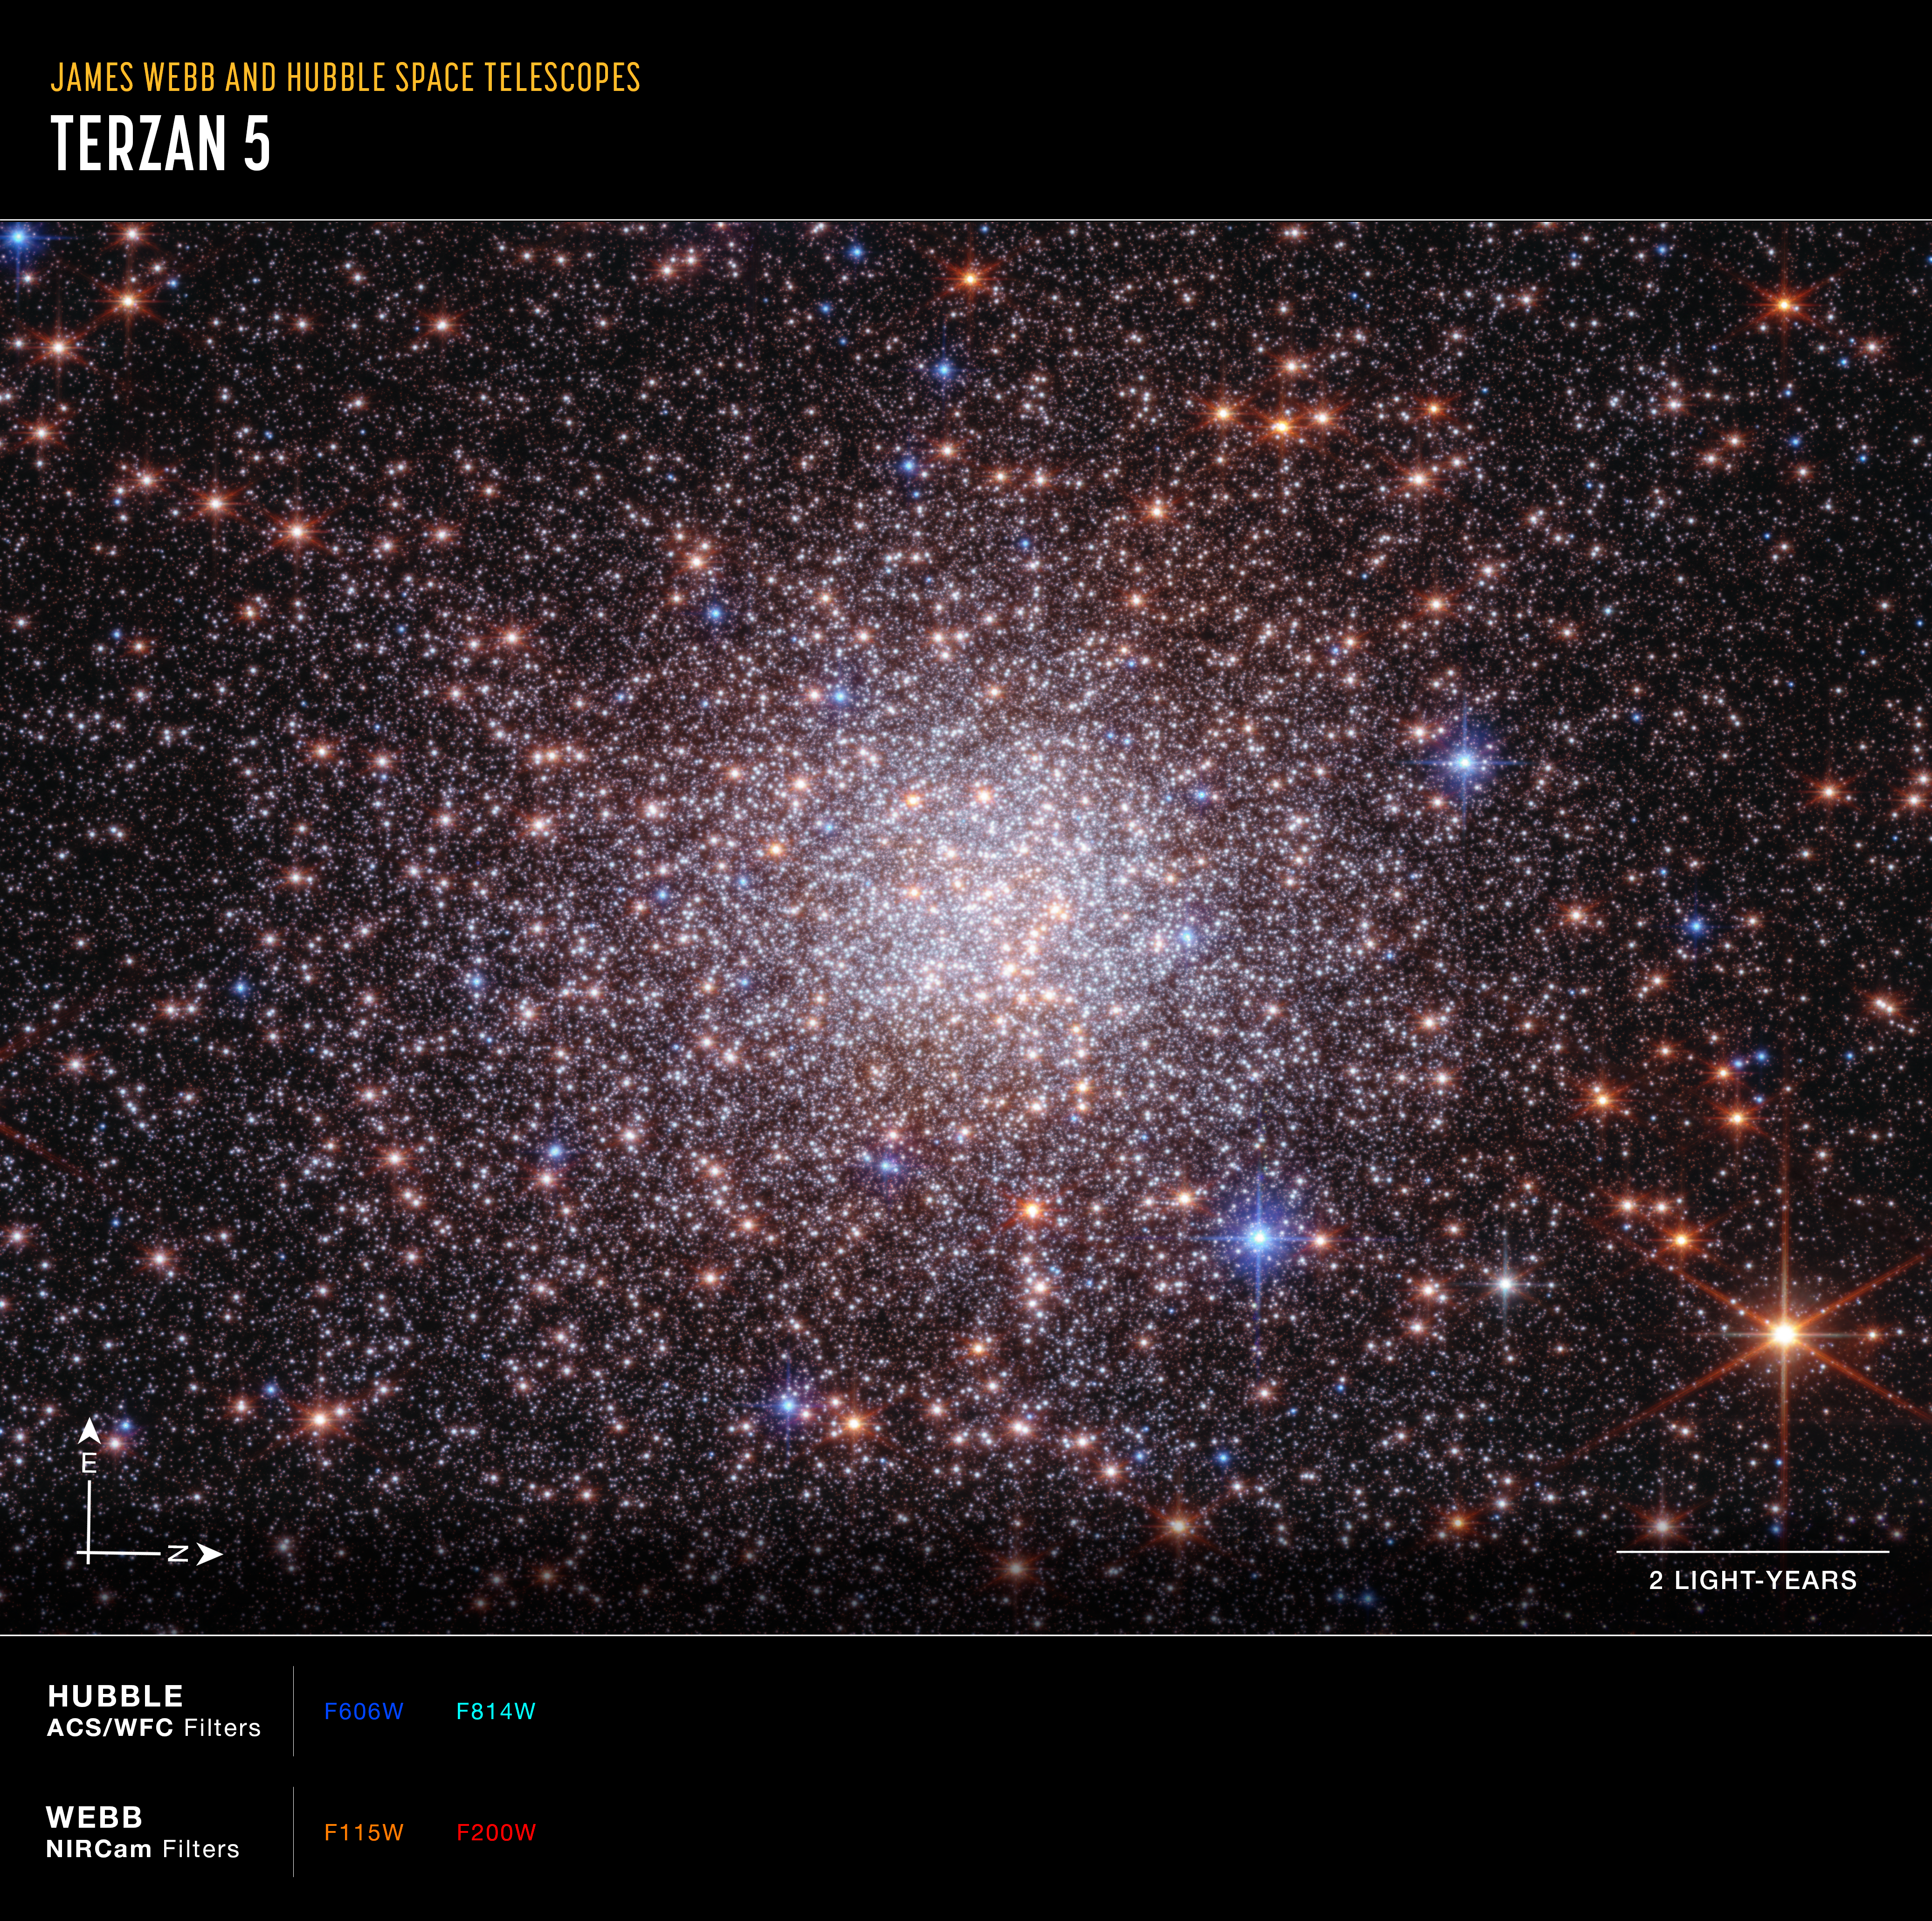

Bulge fossil fragment Terzan 5 (Webb and Hubble image annotated)

This image of bulge fossil fragment Terzan 5 was captured by the James Webb and Hubble space telescopes. Webb’s data are from its NIRCam (Near-Infrared Camera) and Hubble’s from its Advanced Camera for Surveys (ACS).

The image shows a scale bar, compass arrows, and colour key for reference.

The scale bar is labeled in light-years along the bottom, which is the distance that light travels in one Earth-year. (It takes two years for light to travel a distance equal to the length of the scale bar.) One light-year is equal to about 5.88 trillion miles or 9.46 trillion kilometers.

The north and east compass arrows show the orientation of the image on the sky. Note that the relationship between north and east on the sky (as seen from below) is flipped relative to direction arrows on a map of the ground (as seen from above).

This image shows visible and near-infrared wavelengths of light that have been translated into visible-light colours. The colour key shows which NIRCam and ACS filters were used when collecting the light. The colour of each filter name is the visible-light colour used to represent the infrared light that passes through that filter.

This image was created with Hubble data from proposal: 12933 (F. R. Ferraro) and Webb data from proposal: 5502 (F. R. Ferraro).

Credit: NASA, ESA, CSA, STScI, G. Zullo (University of Bologna), F. R. Ferraro (University of Bologna). Image Processing: A. Pagan (STScI)